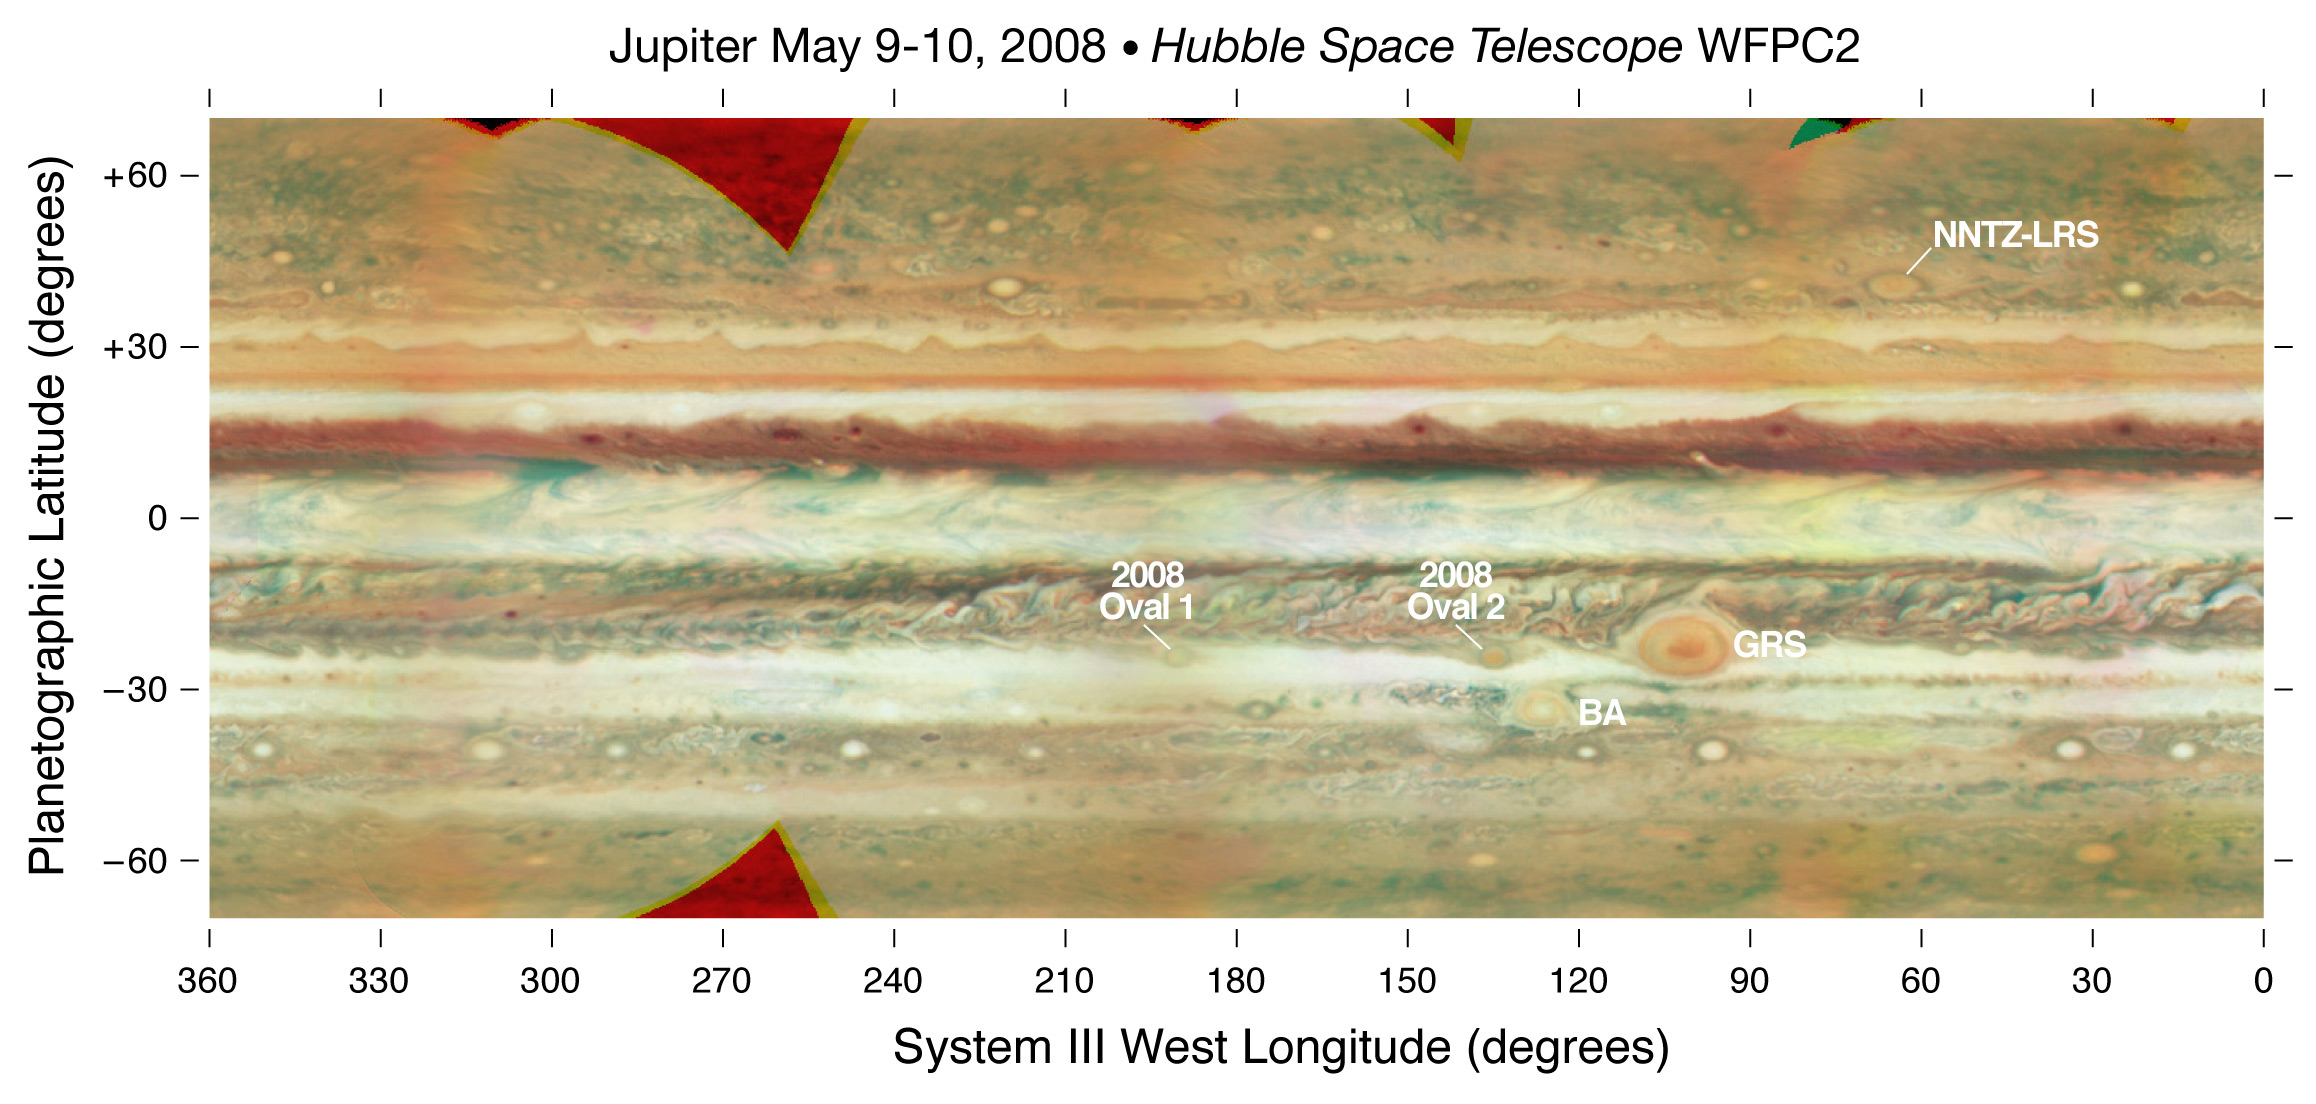

Jupiter Map - Annotated

False colour cylindrical map of Jupiter, constructed from a set of images of the planet obtained with the WFPC2 on the Hubble Space Telescope. Individual frames were obtained on 9 May and 10 May, 2008. The images were deprojected and mosaiced together. The map shows latitudes between +/-70 deg. The resolution is a quarter degree in latitude and longitude. Images were combined at 673, 502, and 410 nm, as red, green, and blue colours.

Credit: NASA, ESA and M. Wong and I. de Pater (University of California, Berkeley)